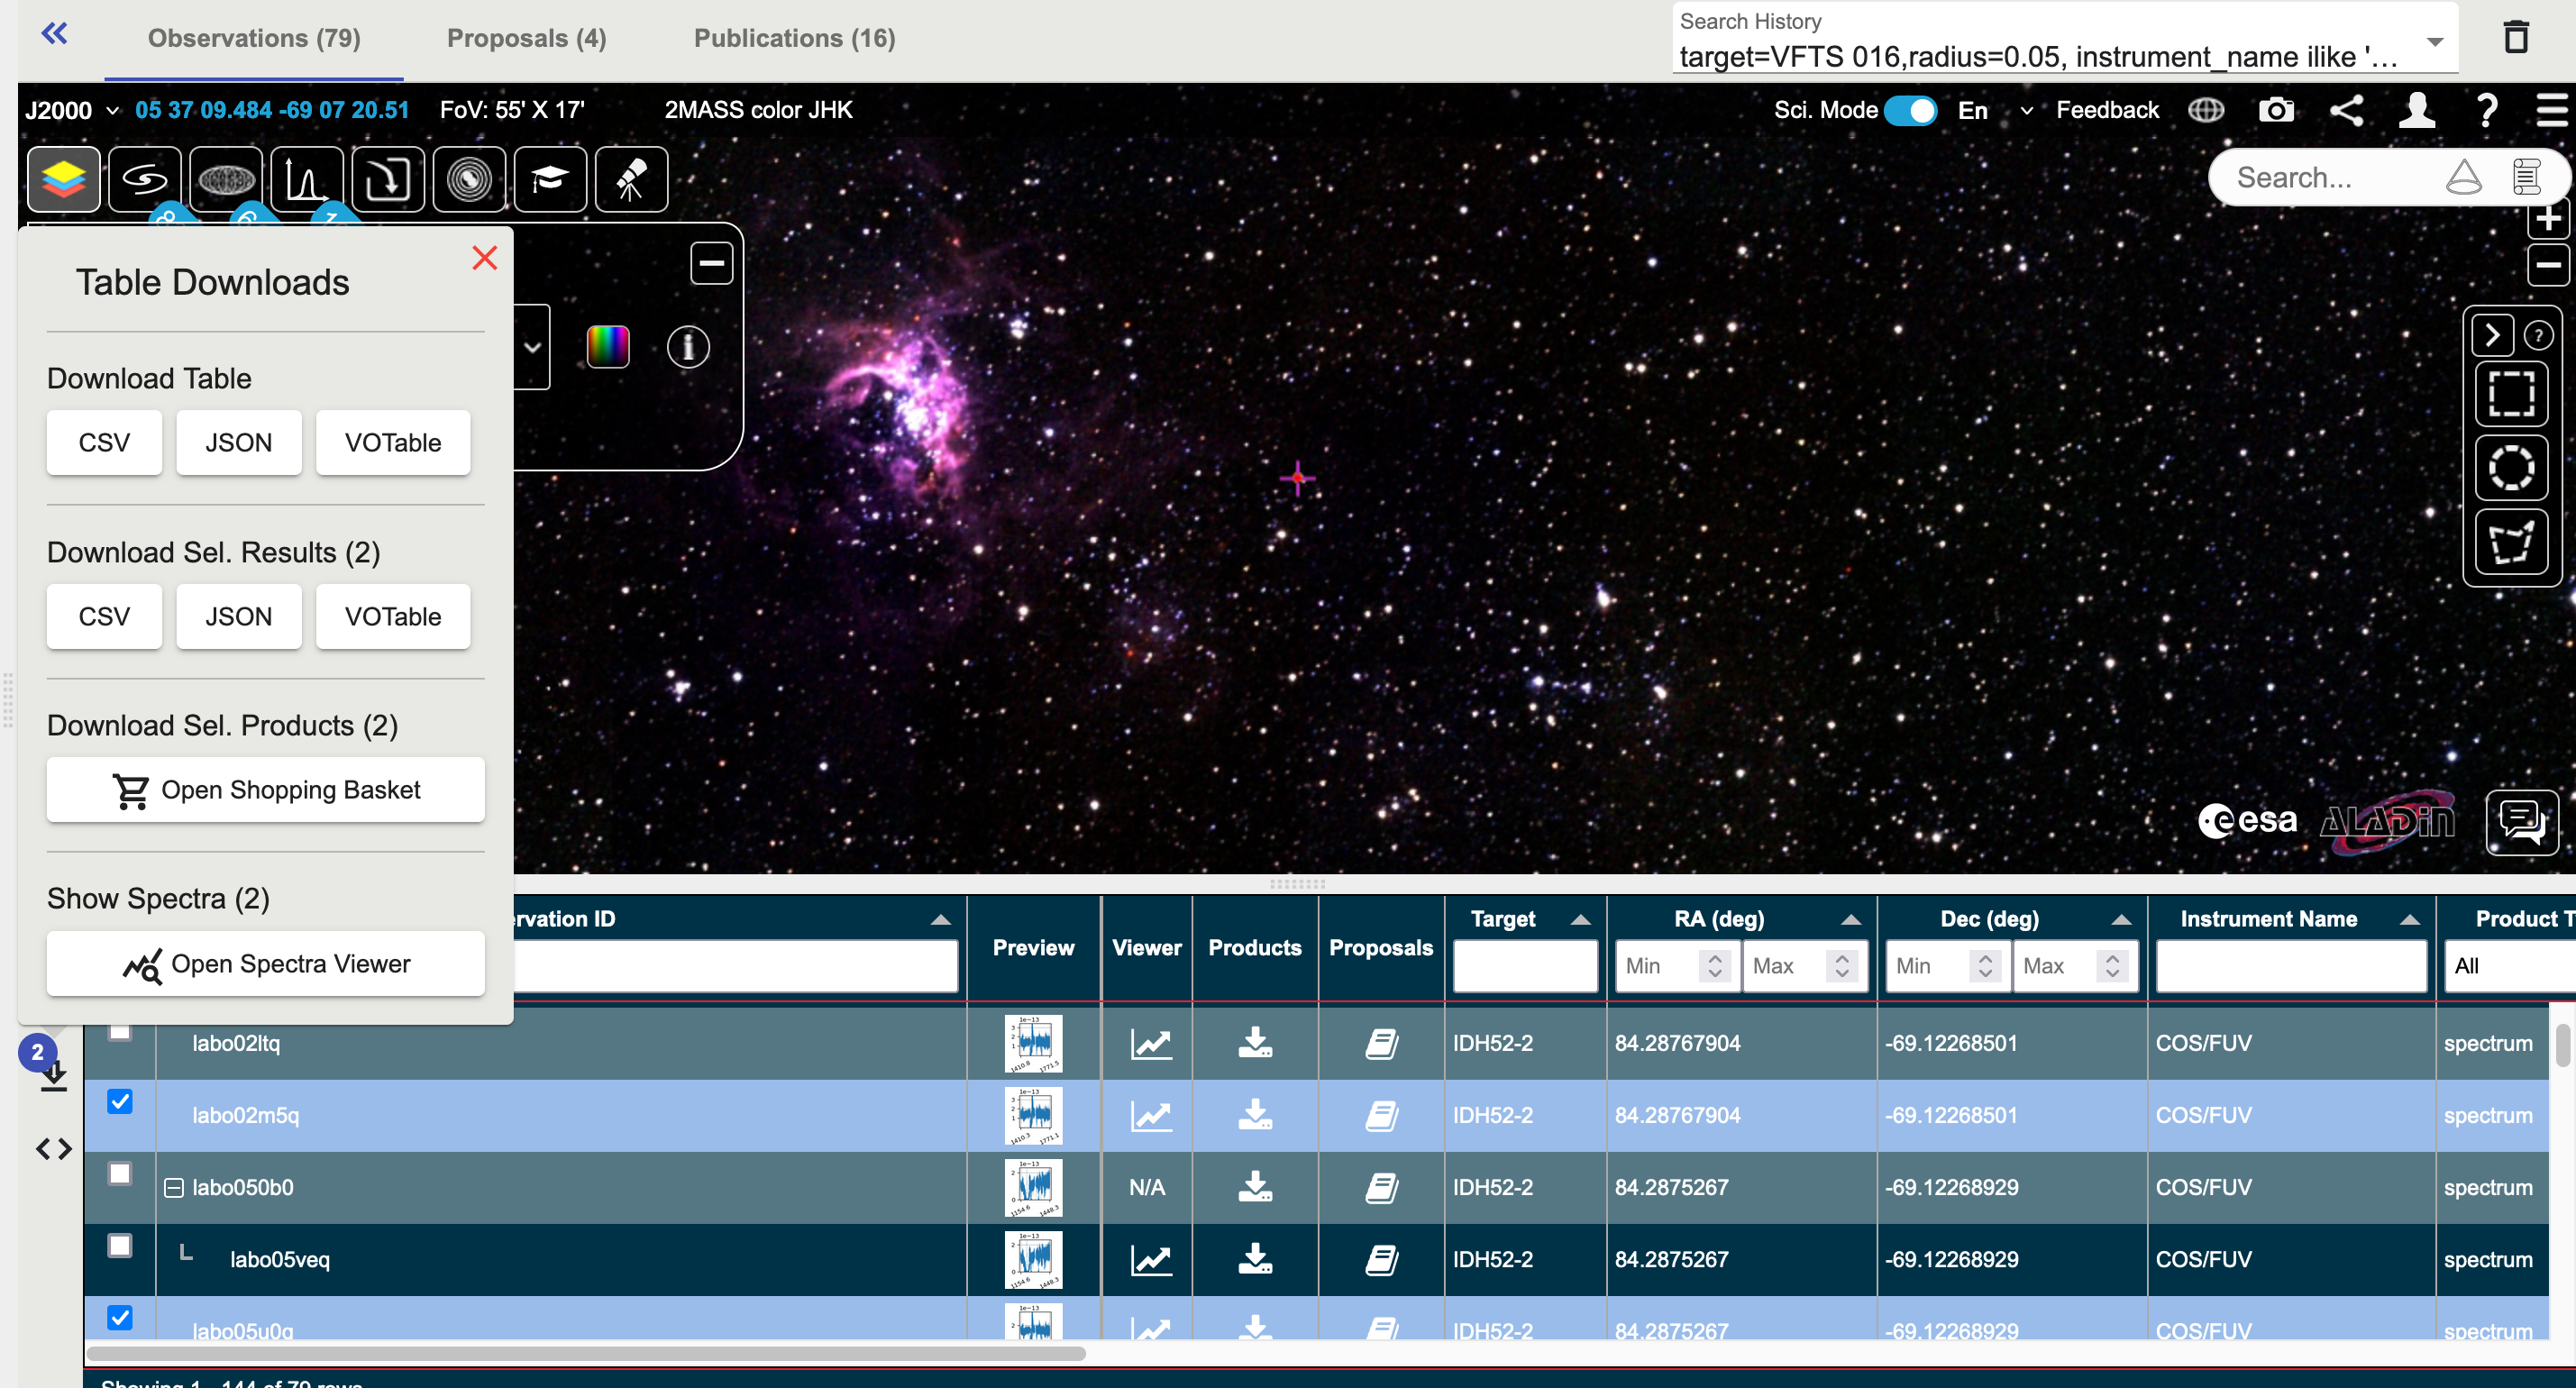

eHST Screenshot - object search

This image shows a screenshot from an eHST object search, showing the option to select observations to be shown in the spectral viewer.

Credit: eHST